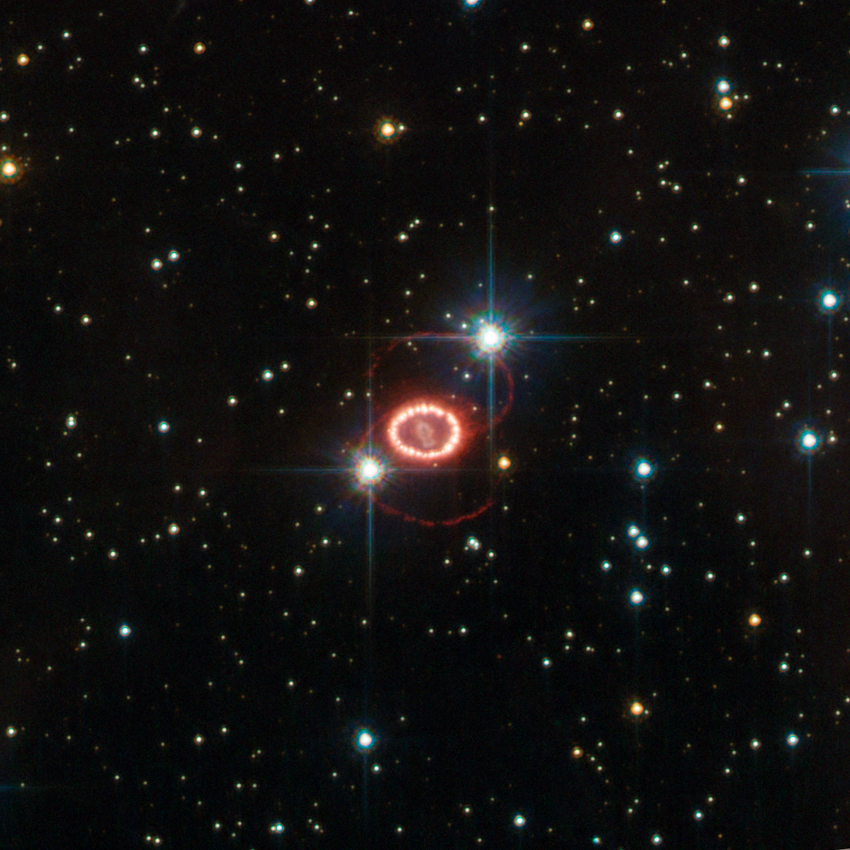

Hubble revisits an old friend

Supernova SN 1987A, one of the brightest stellar explosions since the invention of the telescope more than 400 years ago, is no stranger to the NASA/ESA Hubble Space Telescope. The observatory has been on the frontline of studies into this brilliant dying star since its launch in 1990, three years after the supernova exploded on 23 February 1987. This image of Hubble’s old friend, retreived from the telescope’s data archive, may be the best ever of this object, and reminds us of the many mysteries still surrounding it.

Dominating this picture are two glowing loops of stellar material and a very bright ring surrounding the dying star at the centre of the frame. Although Hubble has provided important clues on the nature of these structures, their origin is still largely unknown.

Another mystery is that of the missing neutron star. The violent death of a high-mass star, such as SN 1987A, leaves behind a stellar remnant — a neutron star or a black hole. Astronomers expect to find a neutron star in the remnants of this supernova, but they have not yet been able to peer through the dense dust to confirm it is there.

The supernova belongs to the Large Magellanic Cloud, a nearby galaxy about 168 000 light-years away. Even though the stellar explosion took place around 166 000 BC, its light arrived here less than 25 years ago.

This picture is based on observations done with the High Resolution Channel of Hubble’s Advanced Camera for Surveys. The field of view is approximately 25 by 25 arcseconds.

Credit: ESA/Hubble & NASA